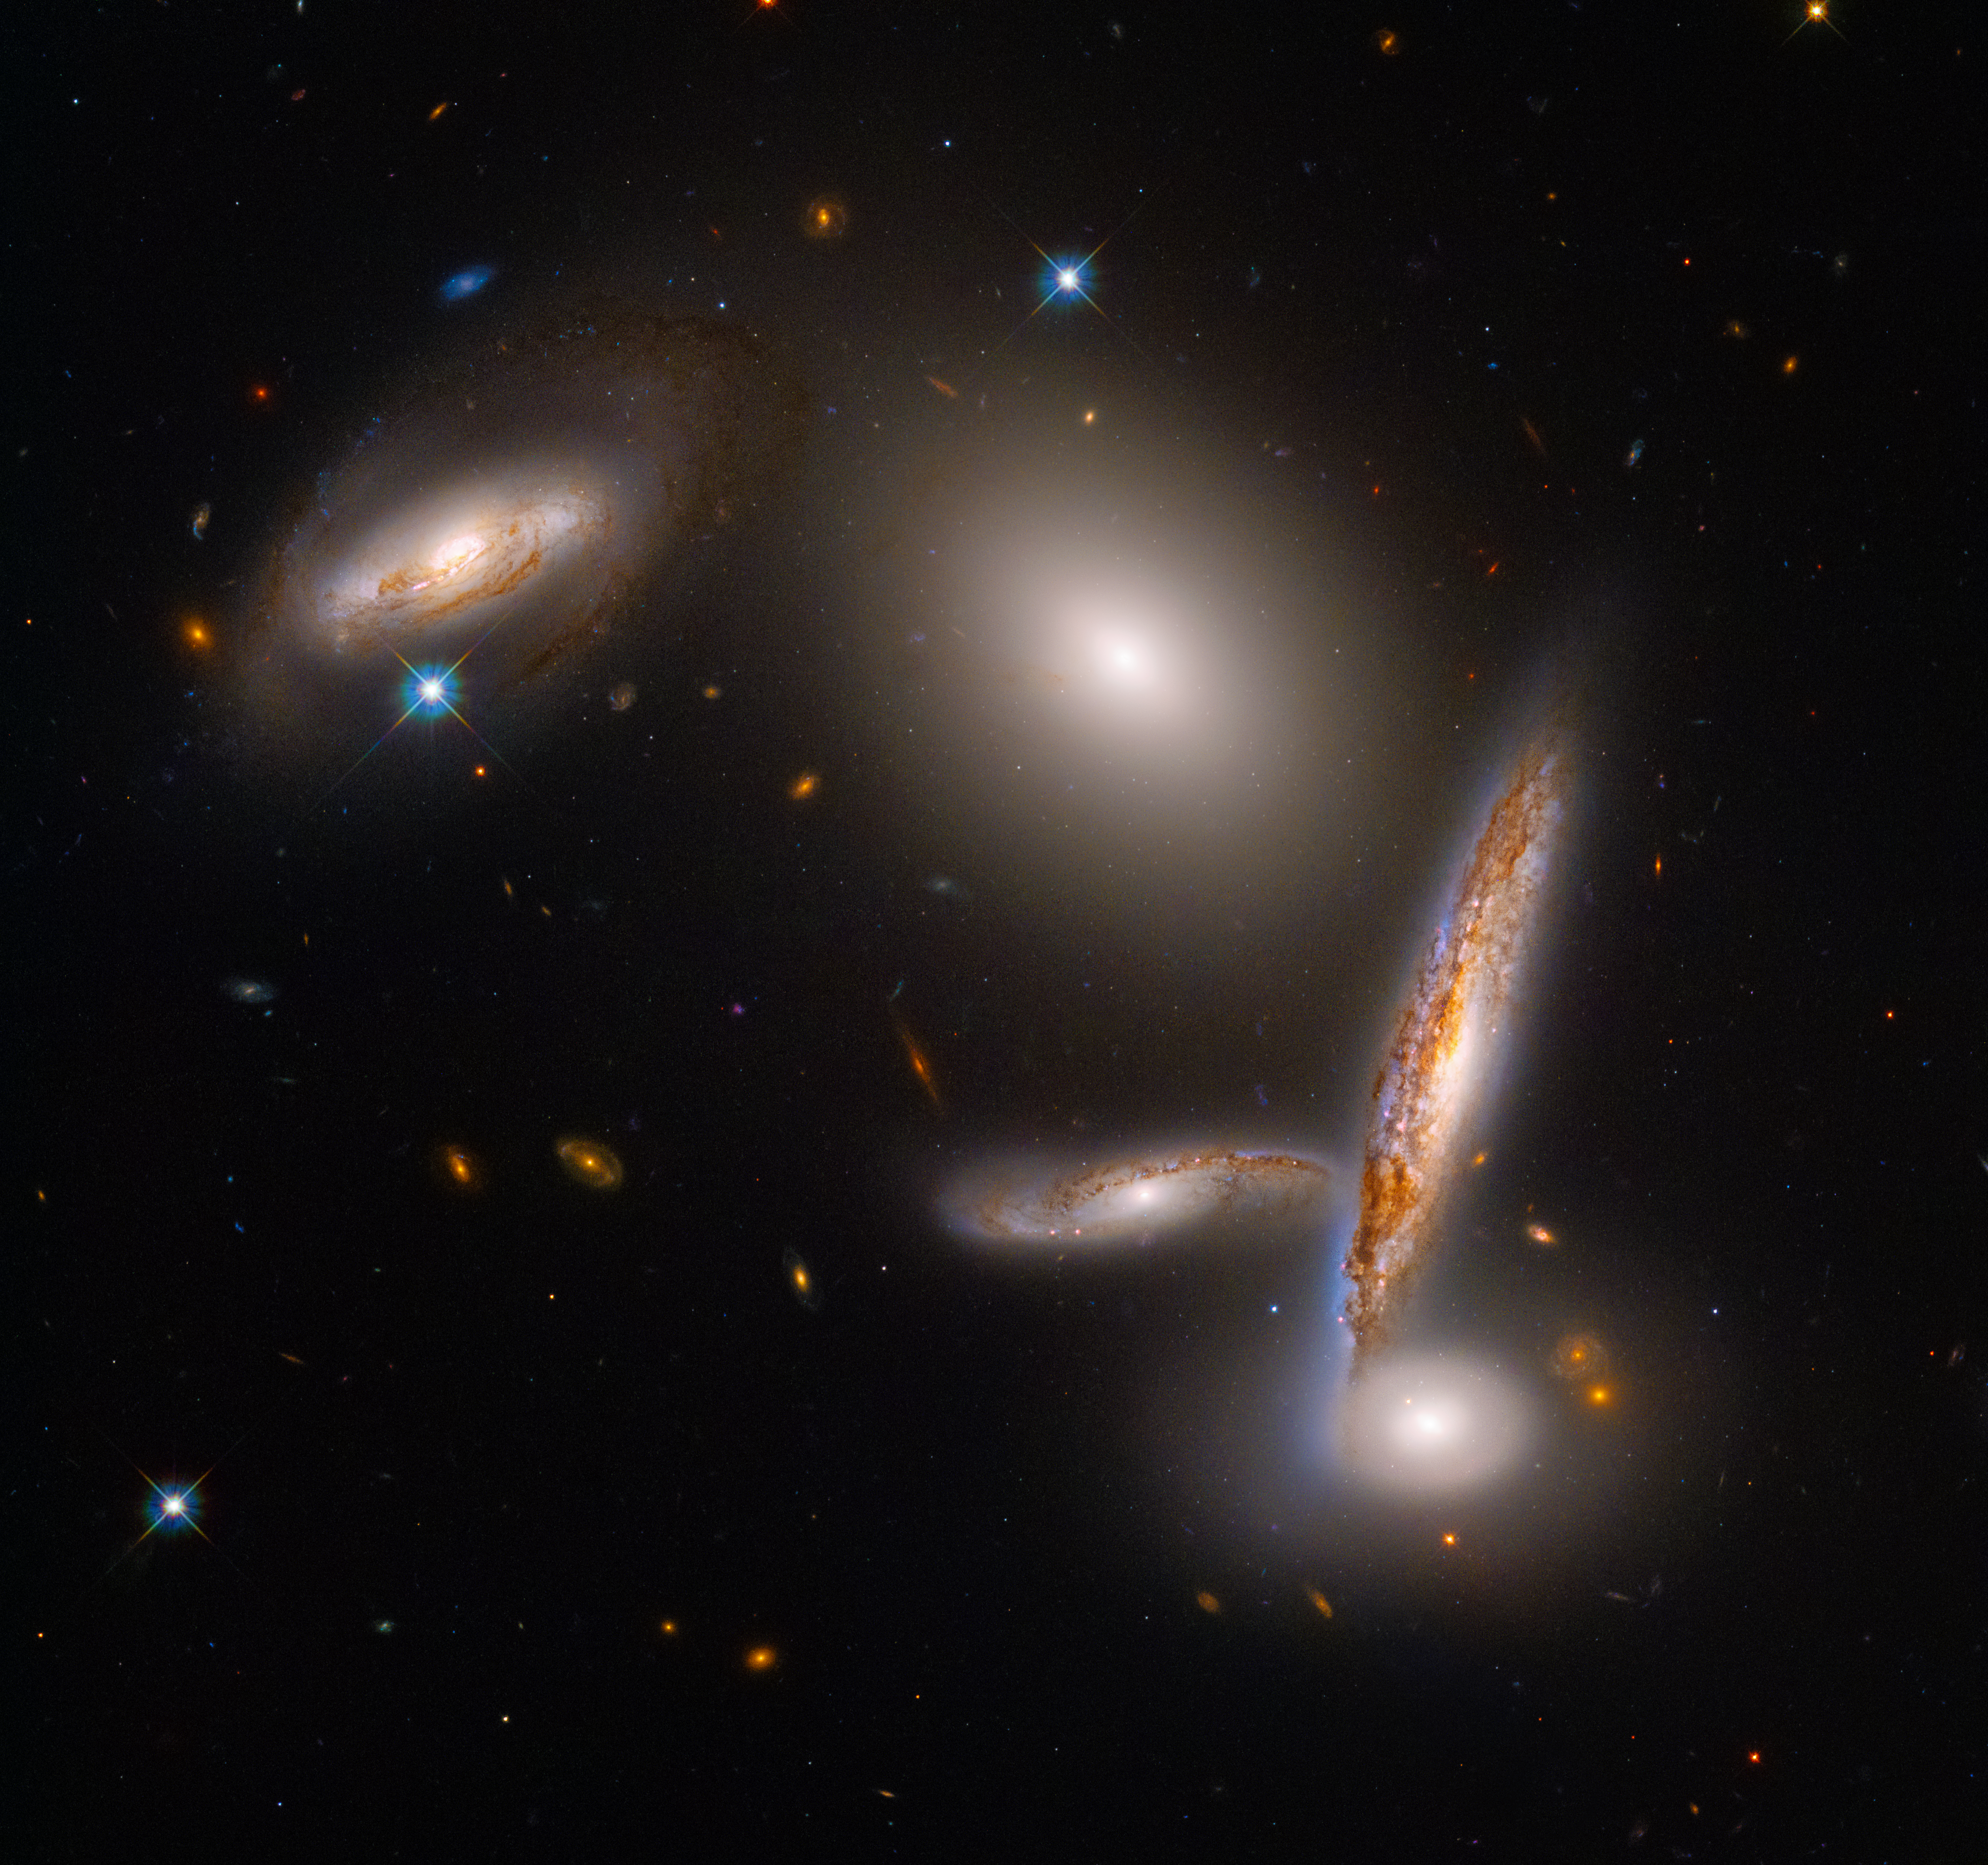

The Hickson Compact Group 40

The NASA/ESA Hubble Space Telescope is celebrating its 32nd birthday with a stunning look at an unusual close-knit collection of five galaxies, called the Hickson Compact Group 40. This snapshot reflects a special moment in their lifetimes as they fall together before they merge.

Credit: NASA, ESA and STScI